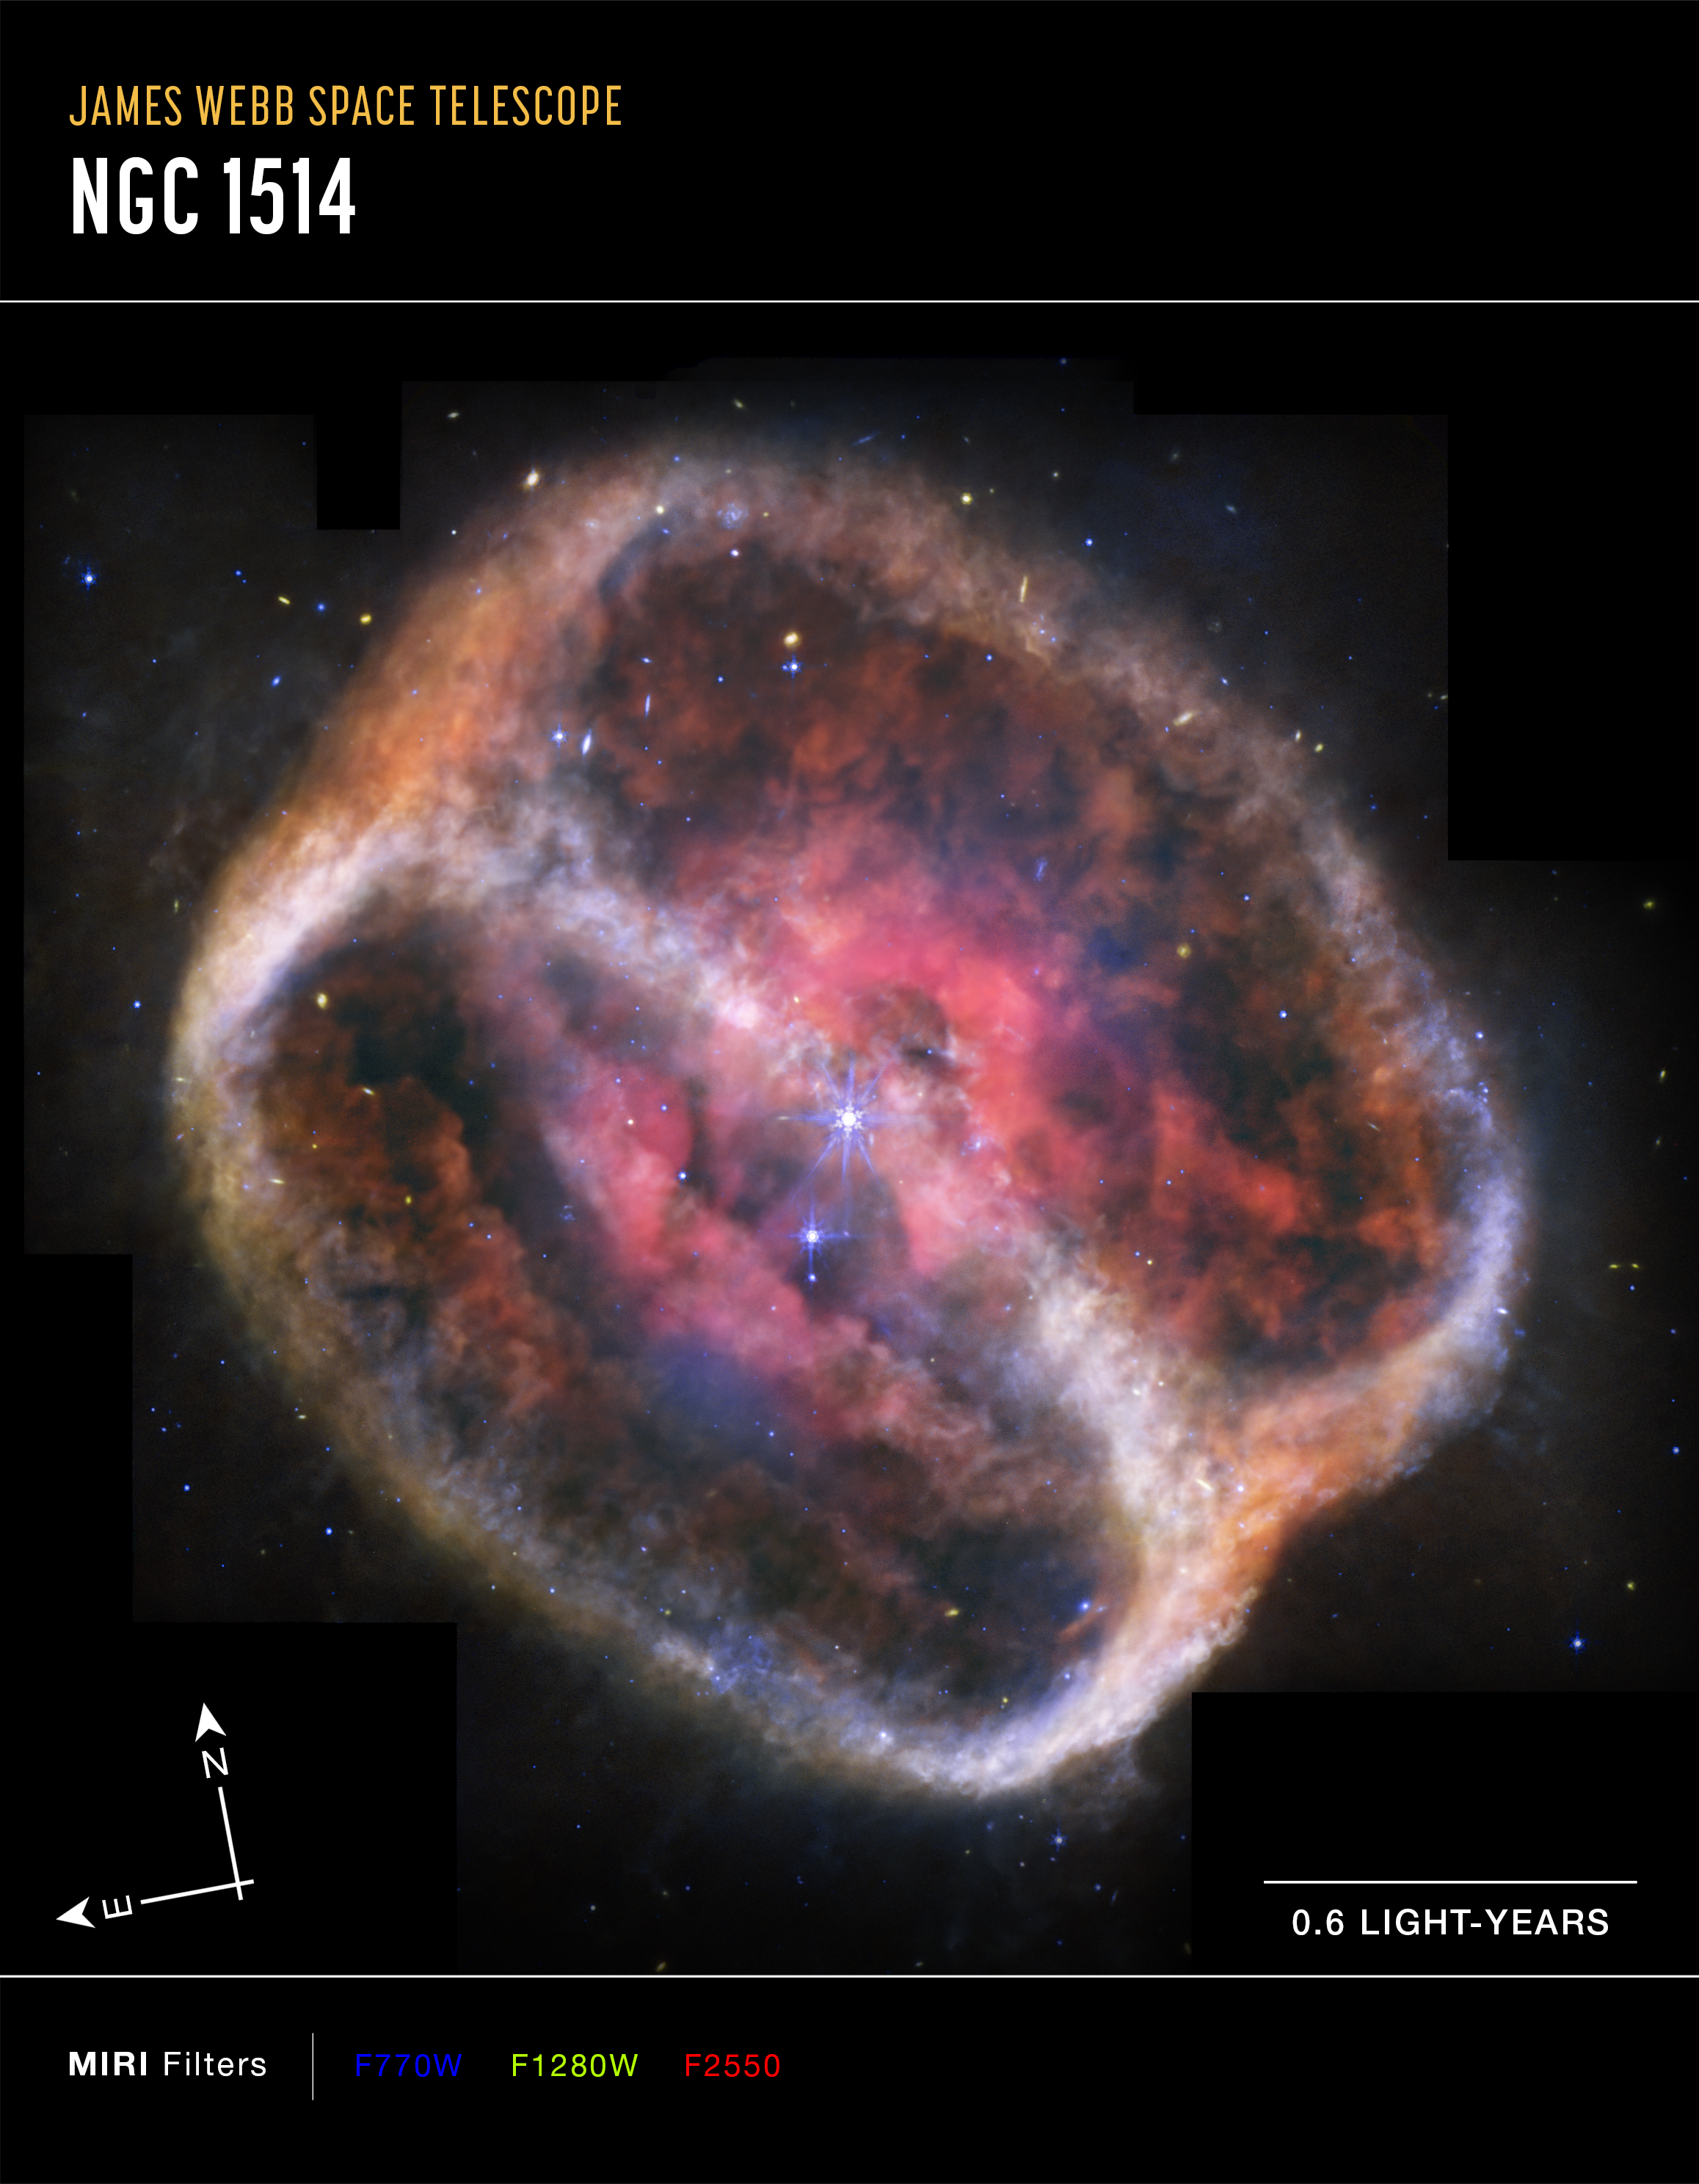

Planetary Nebula NGC 1514 (MIRI image, annotated)

This image of planetary nebula NGC 1514, captured by the James Webb Space Telescope’s MIRI (Mid-Infrared Instrument), shows compass arrows, scale bar, and colour key for reference.

The north and east compass arrows show the orientation of the image on the sky. Note that the relationship between north and east on the sky (as seen from below) is flipped relative to direction arrows on a map of the ground (as seen from above).

The scale bar is labeled in light-years, which is the distance that light travels in one Earth-year. (It takes 0.6 years for light to travel a distance equal to the length of the scale bar.) One light-year is equal to about 5.88 trillion miles or 9.46 trillion kilometers.

This image shows invisible mid-infrared wavelengths of light that have been translated into visible-light colours. The colour key shows which MIRI filters were used when collecting the light. The colour of each filter name is the visible light colour used to represent the infrared light that passes through that filter.

Credit: NASA, ESA, CSA, STScI, Michael Ressler (NASA-JPL), Dave Jones (IAC)